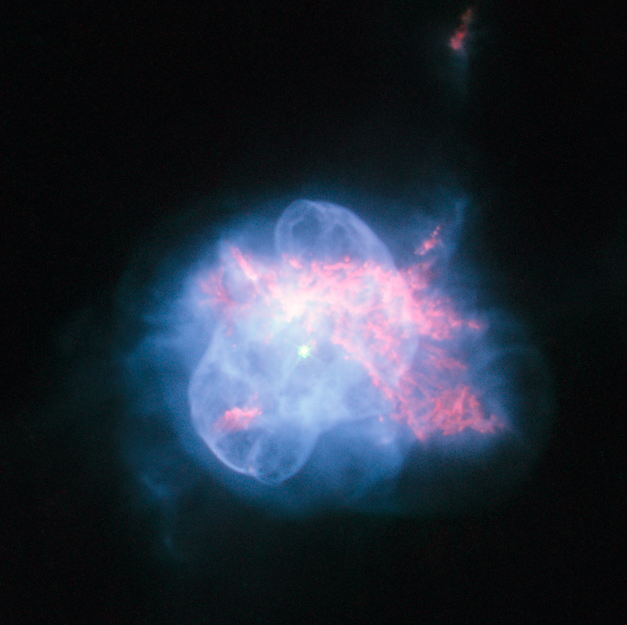

An odd planetary nebula in Hercules

The NASA/ESA Hubble Space Telescope has taken a striking high resolution image of the curious planetary nebula NGC 6210. Located about 6500 light-years away, in the constellation of Hercules, NGC 6210 was discovered in 1825 by the German astronomer Friedrich Georg Wilhelm Struve. Although in a small telescope it appears only as a tiny disc, it is fairly bright.

NGC 6210 is the last gasp of a star slightly less massive than our Sun at the final stage of its life cycle. The multiple shells of material ejected by the dying star form a superposition of structures with different degrees of symmetry, giving NGC 6210 its odd shape. This sharp image shows the inner region of this planetary nebula in unprecedented detail, where the central star is surrounded by a thin, bluish bubble that reveals a delicate filamentary structure. This bubble is superposed onto an asymmetric, reddish gas formation where holes, filaments and pillars are clearly visible.

The life of a star ends when the fuel available to its thermonuclear engine runs out. The estimated lifetime for a Sun-like star is some ten billion years. When the star is about to expire, it becomes unstable and ejects its outer layers, forming a planetary nebula and leaving behind a tiny, but very hot, remnant, known as white dwarf. This compact object, here visible at the centre of the image, cools down and fades very slowly. Stellar evolution theory predicts that our Sun will experience the same fate as NGC 6210 in about five billion years.

This picture was created from images taken with Hubble’s Wide Field Planetary Camera 2 through three filters: the broadband filter F555W (yellow) and the narrowband filters F656N (ionised hydrogen), F658N (ionised nitrogen) and F502N (ionised oxygen). The exposure times were 80 s, 140 s, 800 s and 700 s respectively and the field of view is only about 28 arcseconds across.

Credit: ESA/Hubble and NASA